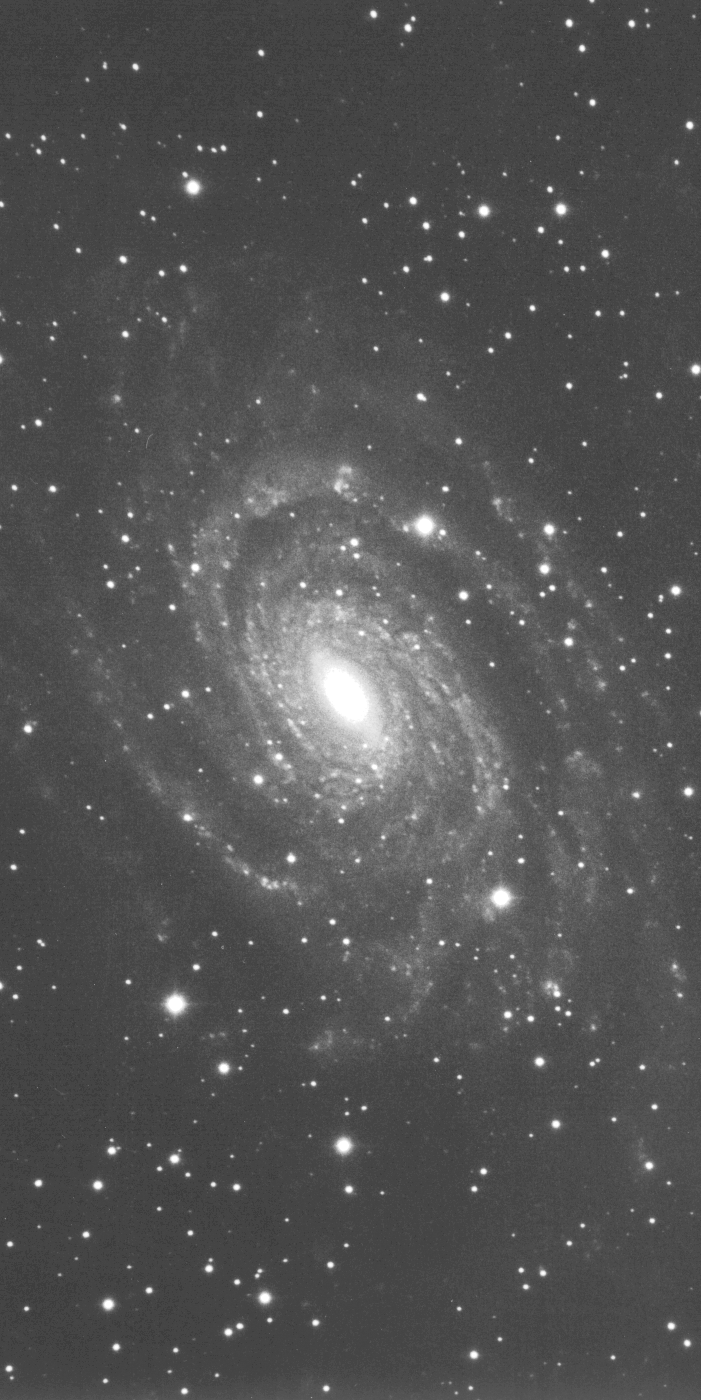

Galaxies: Snapshots in time

Single images from the Galaxies: Snapshots in Time collage.

Credit: NASA & ESA